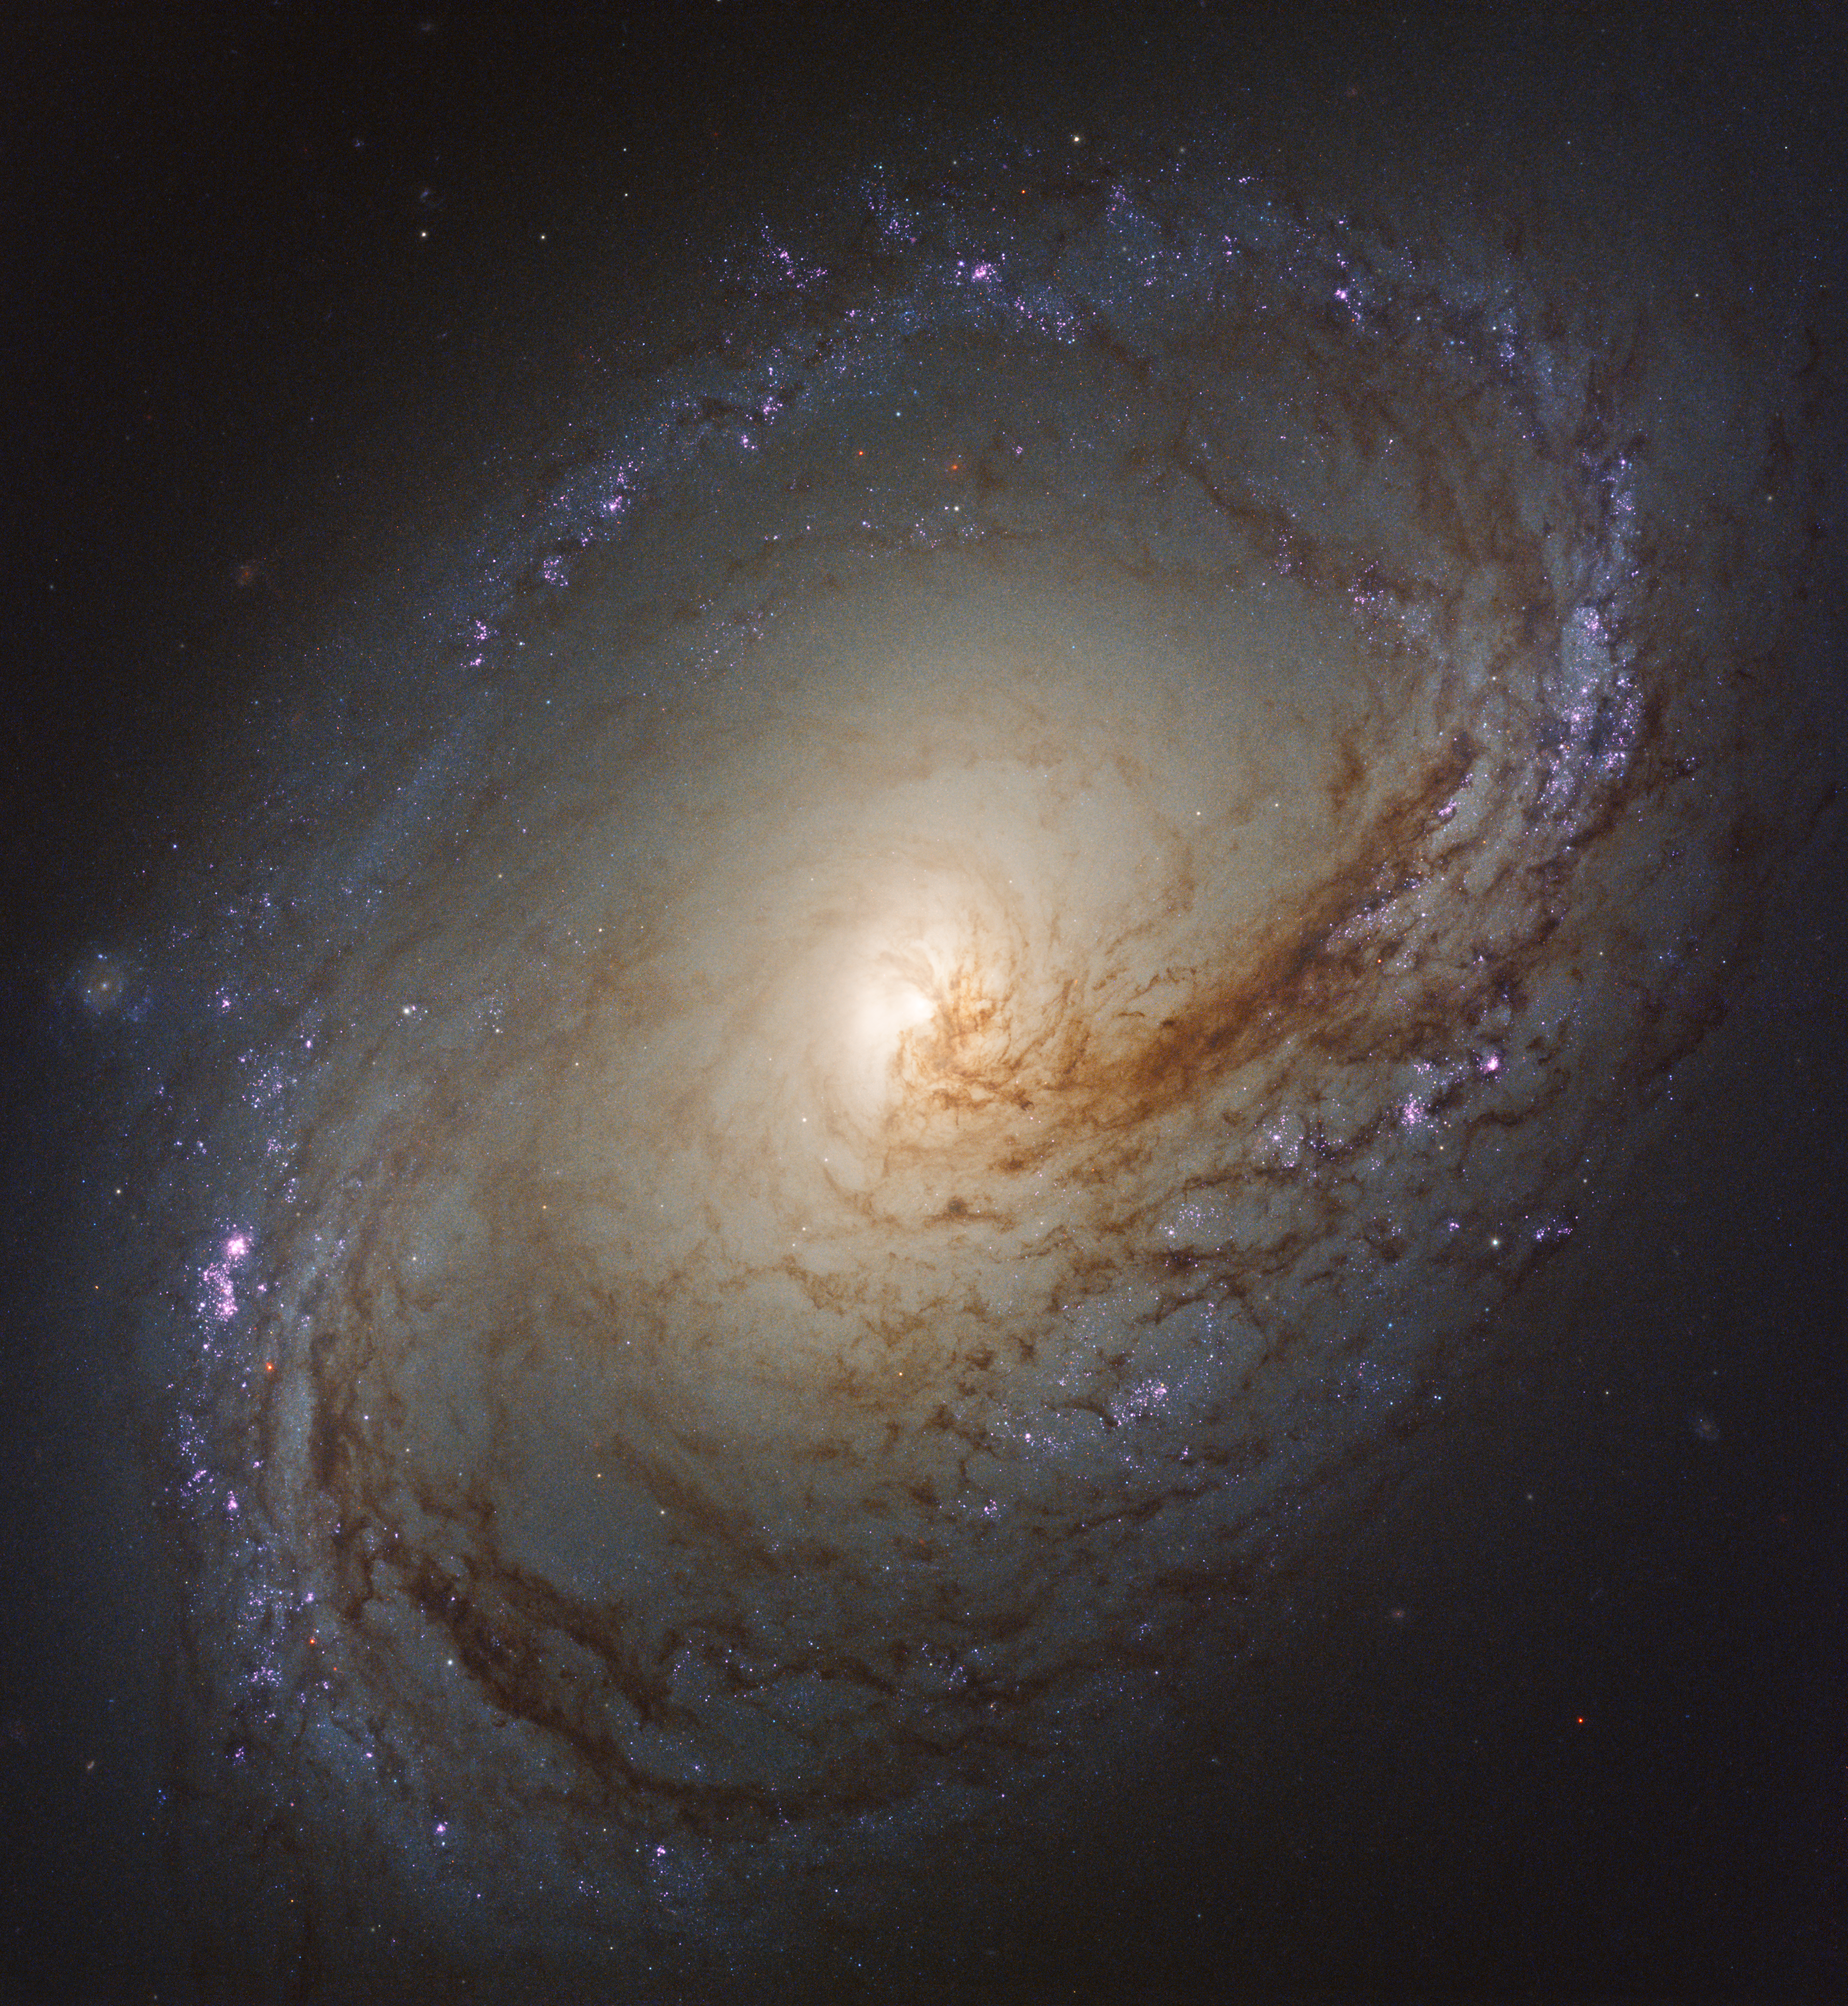

Wave of star formation in Messier 96

Messier 96, also known as NGC 3368, is a spiral galaxy about 35 million light-years away in the constellation of Leo (The Lion). It is of about the same mass and size as the Milky Way. It was first discovered by astronomer Pierre Méchain in 1781, and added to Charles Messier’s famous catalogue of astronomical objects just four days later.

A wave of star formation is occurring along the dark filaments that make up the spiral arms. The fledgling stars illuminate the surrounding hydrogen gas, making the stars appear pink. Star birth begins at the inner spiral arms and moves outward. The milky white regions in the centre of these galaxies represent the glow of countless stars.

An image of this galaxy was already released back in 2015 (potw1535a). This newly-processed image now also shows ultraviolet radiation Hubble captured from the galaxy.

Credit: NASA, ESA, and the LEGUS team